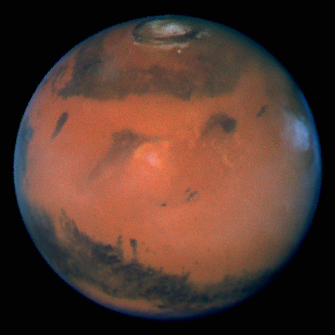

Mars at Opposition

Pictures of the planet Mars taken with the recently refurbished Hubble Space Telescope (HST) will provide the most detailed global view of the red planet ever obtained from Earth.

Credit: David Crisp and the WFPC2 Science Team (Jet Propulsion Laboratory/California Institute of Technology)